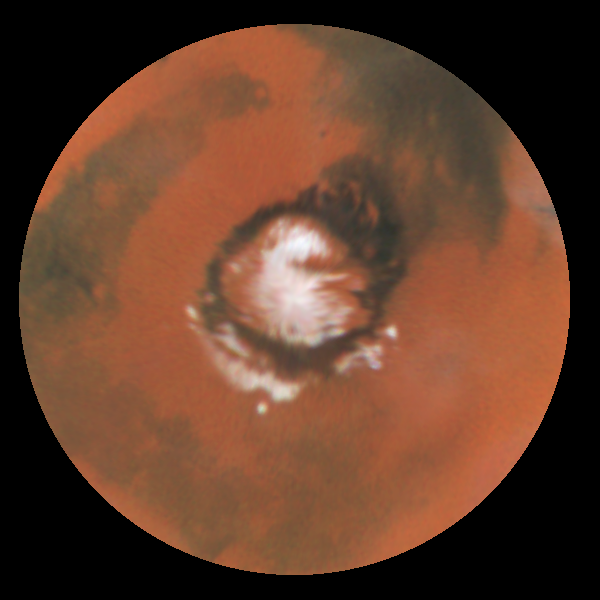

Seasonal Changes in Mars' North Polar Ice Cap

The cap has fully retreated to it's remnant core of water-ice. This residual cap is actually almost cut into two by a large, horn-shaped canyon called Chasma Borealis which is cut deeply into the polar terrain. The HST images also reveal a curious layered terrain which is evidence of past climatic changes on Mars.

The sublimation of all of the carbon dioxide has exposed the ring of dark sand dunes which encircle the North Polar Cap. Outliers of ice persist south of the polar sand sea (between the 3 o'clock and 9 o'clock positions). The bright circular features at 3, 6, and 9 o'clock are ice-filled craters.

Credit: Phil James (Univ. Toledo), Todd Clancy (Space Science Inst., Boulder, CO), Steve Lee (Univ. Colorado), and NASA/ESA